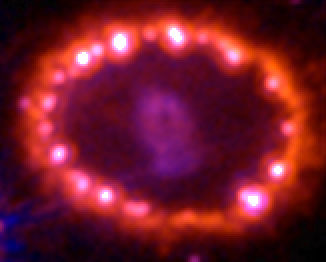

Supernova 1987A: January 5, 2003

This Hubble telescope image shows the supernova's triple-ring system, including the bright spots along the inner ring of gas surrounding the exploded star. A shock wave of material unleashed by the stellar blast is slamming into regions along the inner ring, heating them up, and causing them to glow. The ring, about a light-year across, was probably shed by the star about 20 000 years before it exploded.

Credit: NASA, ESA, and R. Kirshner (Harvard-Smithsonian Center for Astrophysics)